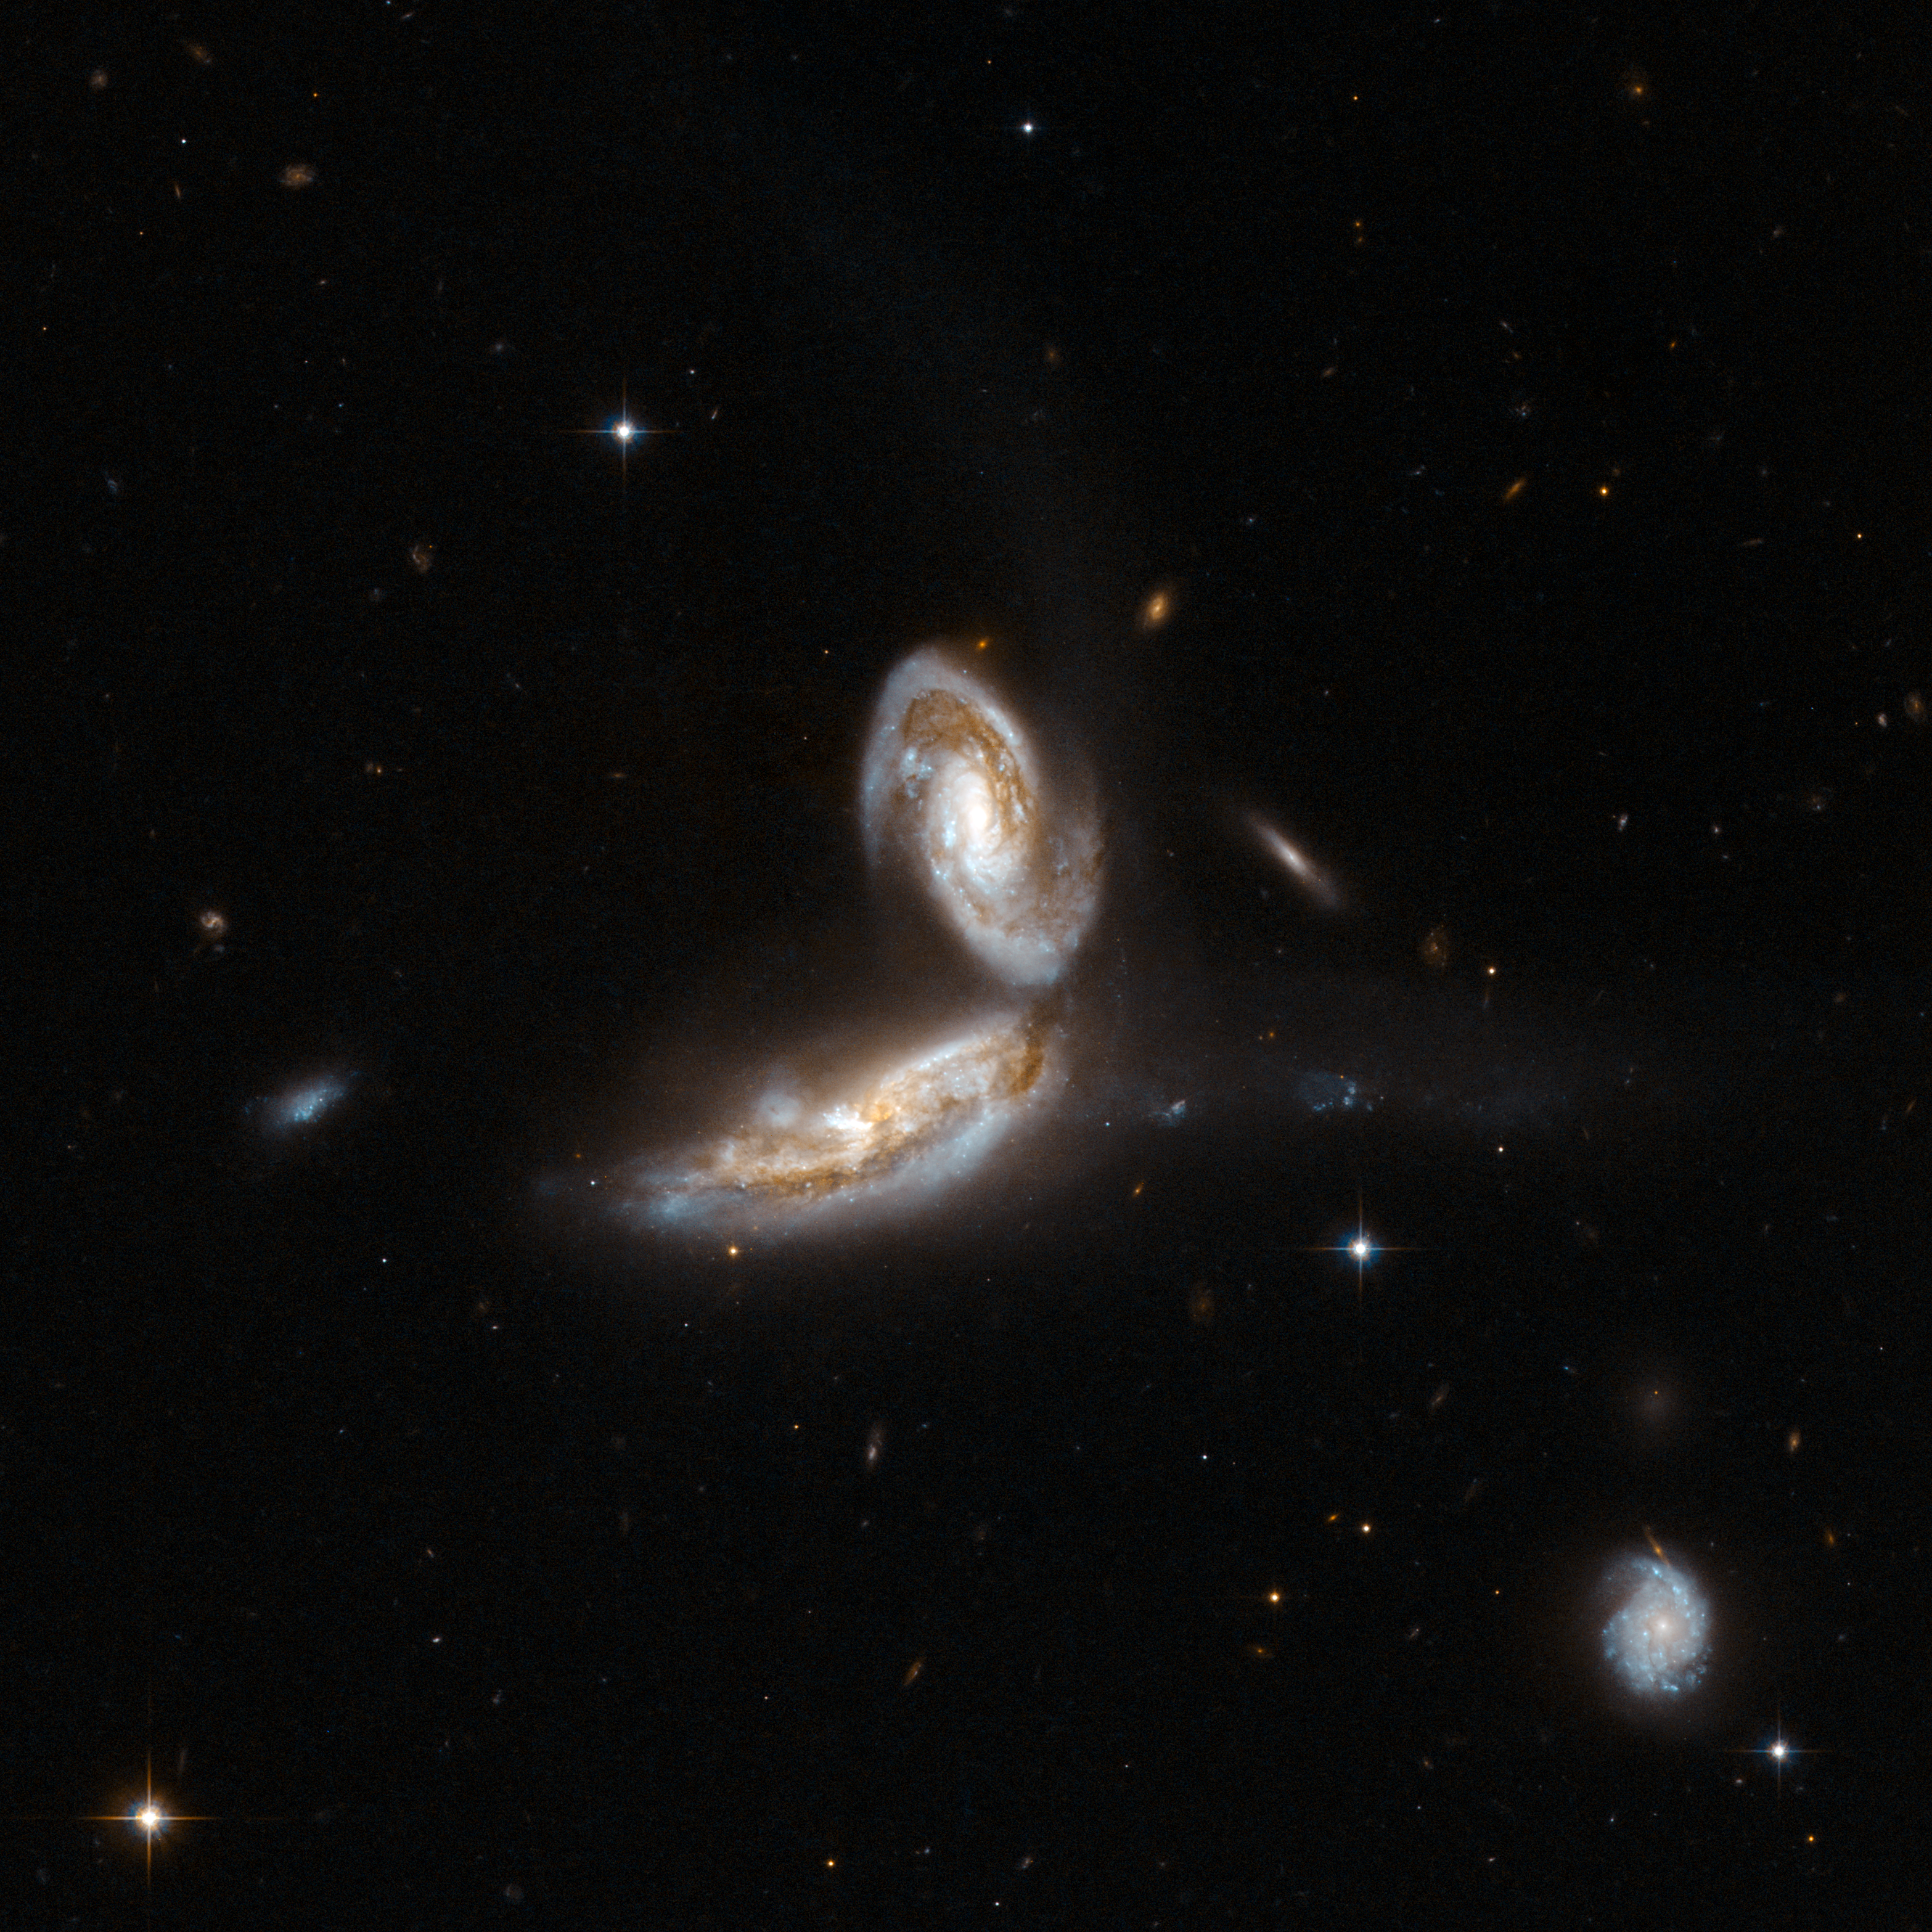

NGC 5331

NGC 5331 is a pair of interacting galaxies beginning to "link arms". There is a blue trail which appears in the image flowing to the right of the system. NGC 5331 is very bright in the infrared, with about a hundred billion times the luminosity of the Sun. It is located in the constellation Virgo, the Maiden, about 450 million light-years away from Earth.

This image is part of a large collection of 59 images of merging galaxies taken by the Hubble Space Telescope and released on the occasion of its 18th anniversary on 24th April 2008.

Credit: NASA, ESA, the Hubble Heritage Team (STScI/AURA)-ESA/Hubble Collaboration and A. Evans (University of Virginia, Charlottesville/NRAO/Stony Brook University)